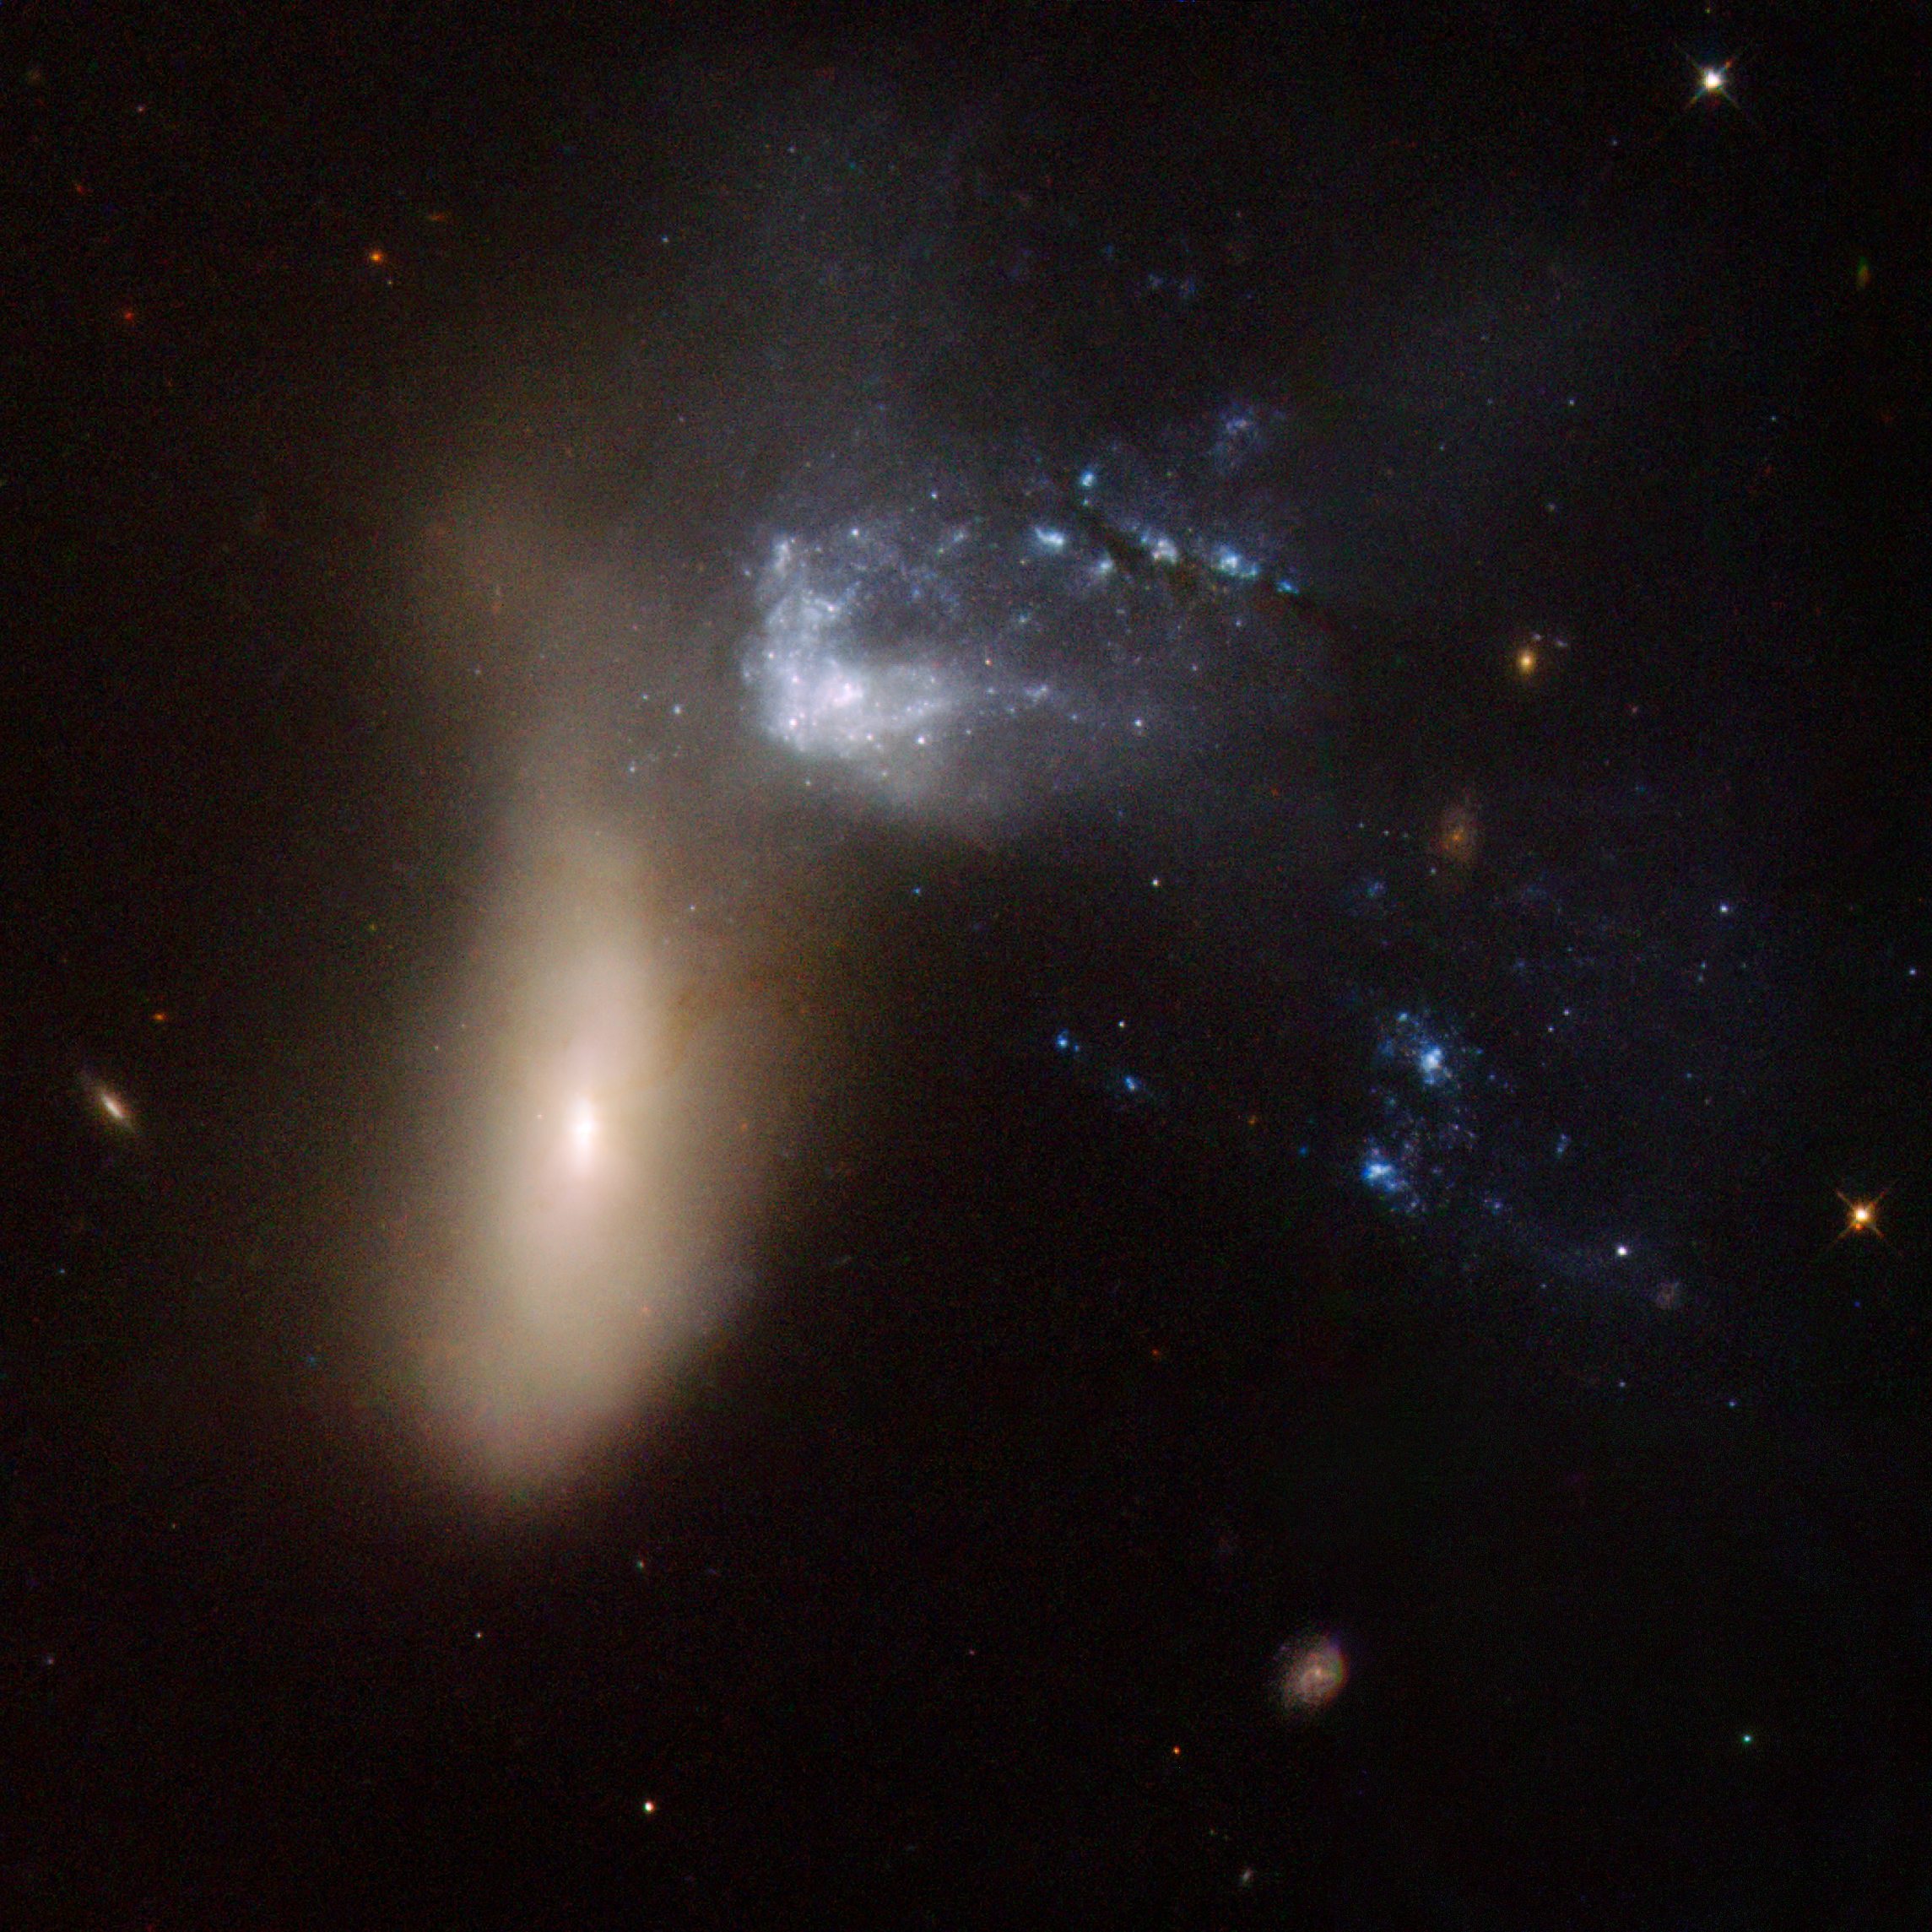

NGC 454

NGC 454 is galaxy pair comprising a large red elliptical galaxy and an irregular gas-rich blue galaxy. The system is in the early stages of an interaction that has severely distorted both components. The three bright blue knots of very young stars to the left of the two main components are probably part of the irregular blue galaxy. Although the dust lanes that stretch all the way to the centre of the elliptical galaxy suggest that gas has penetrated that far, no signs of star formation or nuclear activity are visible. The pair is approximately 164 million light-years away.

This image is part of a large collection of 59 images of merging galaxies taken by the Hubble Space Telescope and released on the occasion of its 18th anniversary on 24th April 2008.

Credit: NASA, ESA, the Hubble Heritage Team (STScI/AURA)-ESA/Hubble Collaboration and A. Evans (University of Virginia, Charlottesville/NRAO/Stony Brook University)